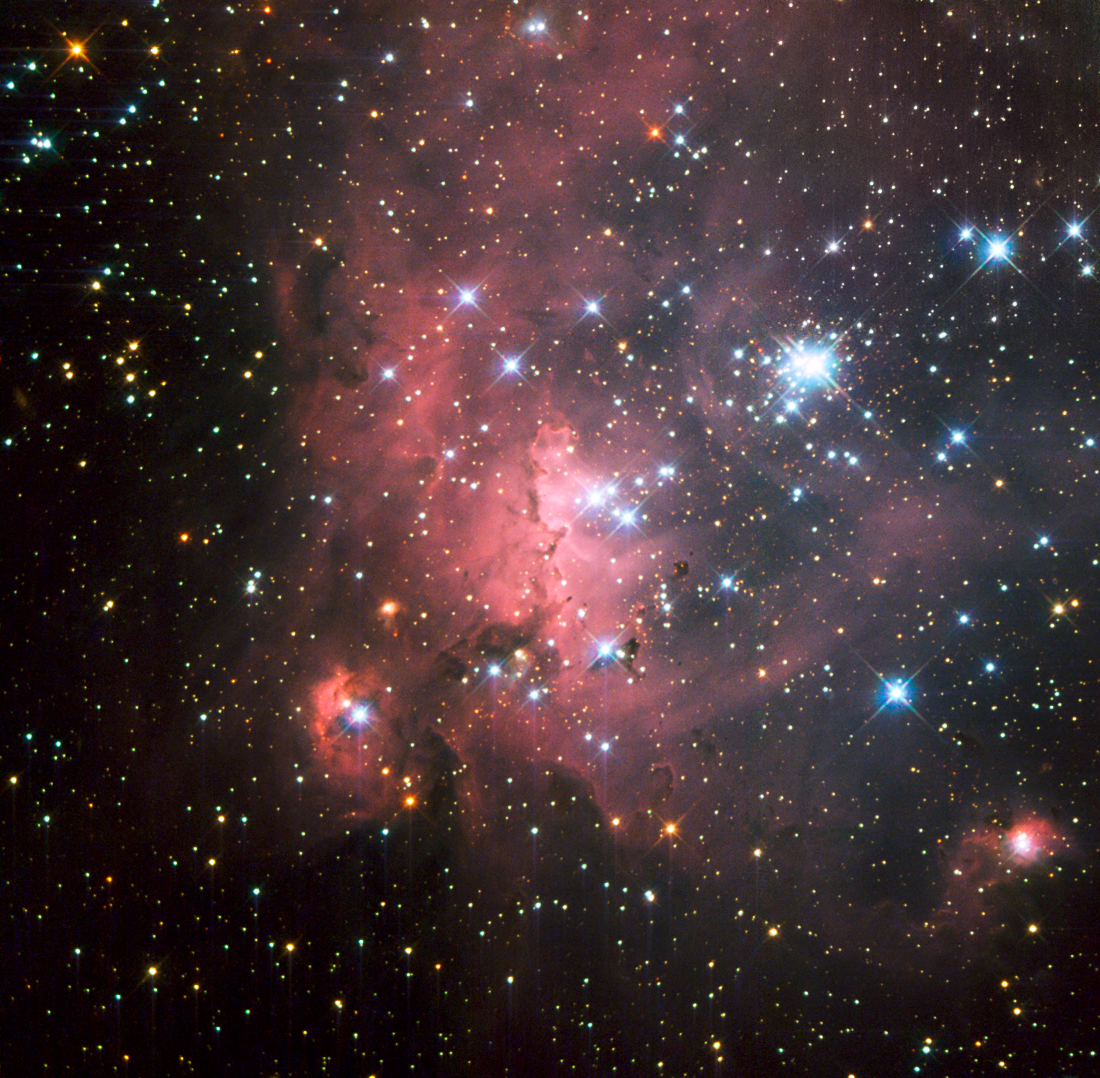

Probing a super-giant shell of gas and stars

In one of the largest known star formation regions in the Large Magellanic Cloud (LMC), a small satellite galaxy of the Milky Way, lie young and bright stellar groupings known as OB associations. One of these associations, called LH 72, was captured in this dramatic NASA/ESA Hubble Space Telescope image. It consists of a few high-mass, young stars embedded in a beautiful and dense nebula of hydrogen gas.

Much of the star formation in the LMC occurs in super-giant shells. These regions of interstellar gas are thought to have formed due to strong stellar winds and supernova explosions that cleared away much of the material around the stars creating wind-blown shells. The swept-up gas eventually cools down and fragments into smaller clouds that dot the edges of these regions and eventually collapse to form new stars.

The biggest of these shells, home to LH 72, is designated LMC4. With a diameter of about 6000 light-years, it is the largest in the Local Group of galaxies that is home to both the Milky Way and LMC. Studying gas-embedded young associations of stars like LH 72 is a way of probing the super-giant shells to understand how they formed and evolved.

This image was taken with Hubble’s Wide Field Planetary Camera 2 using five different filters in ultraviolet, visible and infrared light. The field of view is approximately 1.8 by 1.8 arcminutes.

Credit: ESA/Hubble, NASA and D. A. Gouliermis